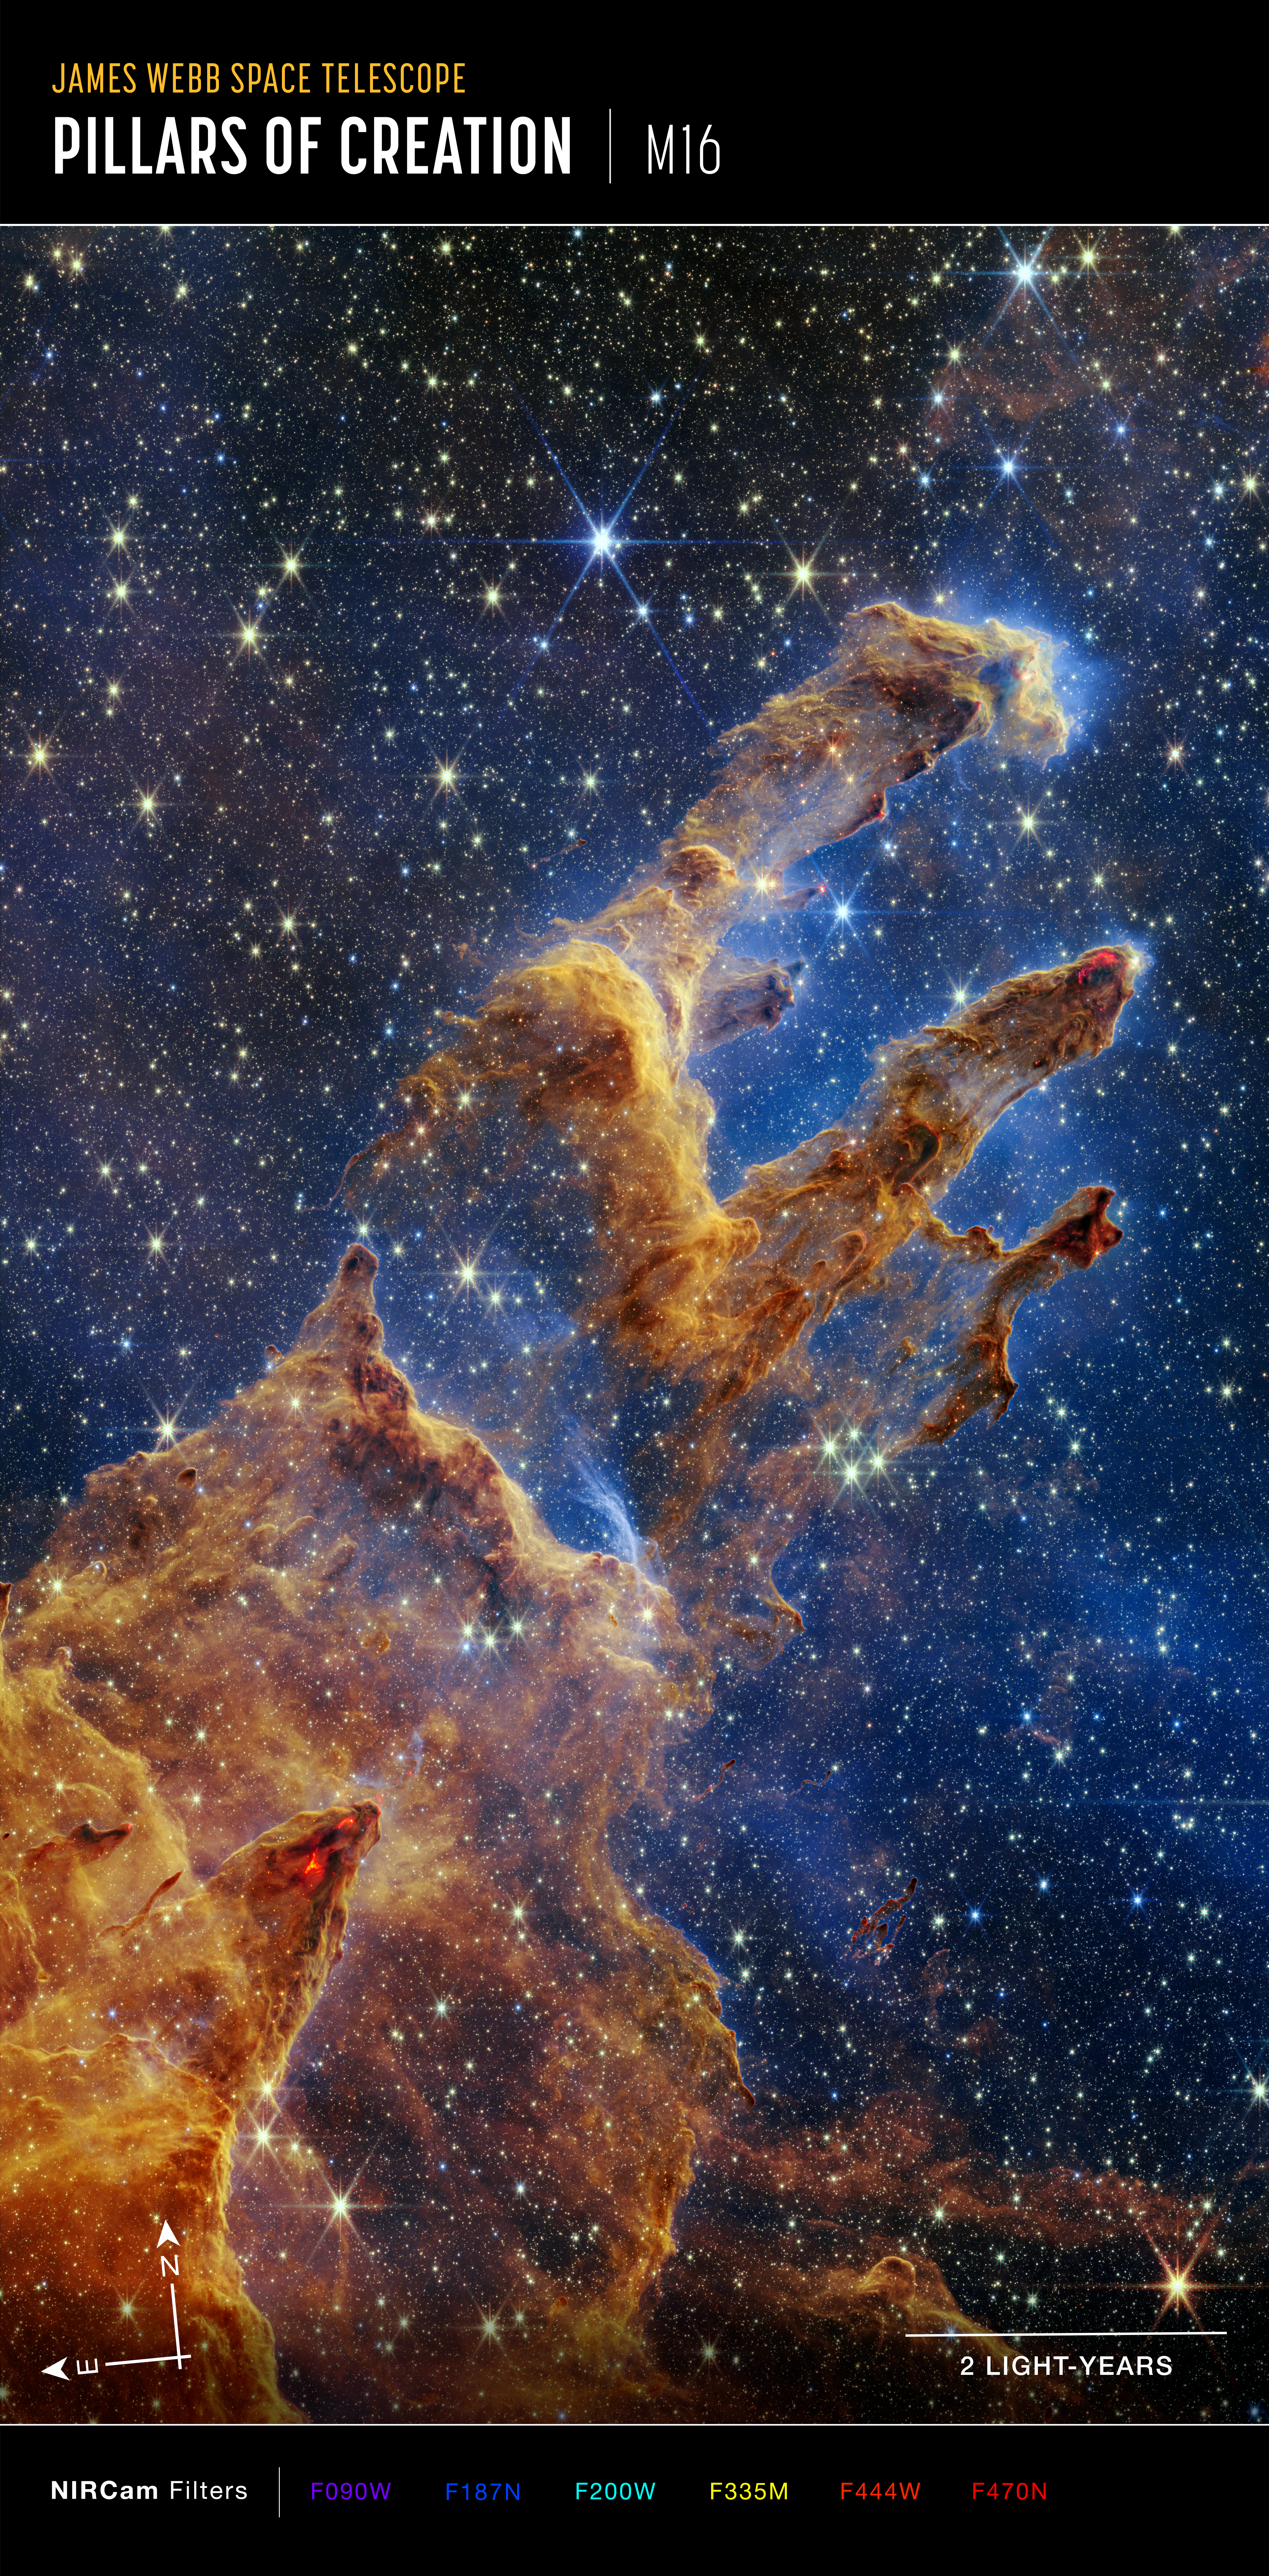

Webb Takes a Stunning, Star-Filled Portrait of the Pillars of Creation (Annotated)

The Pillars of Creation are set off in a kaleidoscope of colour in the NASA/ESA/CSA James Webb Space Telescope’s near-infrared-light view. The pillars look like arches and spires rising out of a desert landscape, but are filled with semi-transparent gas and dust, and ever changing. This is a region where young stars are forming – or have barely burst from their dusty cocoons as they continue to form.

Protostars are the scene-stealers in this Near-Infrared Camera (NIRCam) image. These are the bright red orbs that sometimes appear with eight diffraction spikes. When knots with sufficient mass form within the pillars, they begin to collapse under their own gravity, slowly heat up, and eventually begin shining brightly.

Along the edges of the pillars are wavy lines that look like lava. These are ejections from stars that are still forming. Young stars periodically shoot out jets that can interact within clouds of material, like these thick pillars of gas and dust. This sometimes also results in bow shocks, which can form wavy patterns like a boat does as it moves through water. These young stars are estimated to be only a few hundred thousand years old, and will continue to form for millions of years.

Although it may appear that near-infrared light has allowed Webb to “pierce through” the background to reveal great cosmic distances beyond the pillars, the interstellar medium stands in the way, like a drawn curtain.

This is also the reason why there are no distant galaxies in this view. This translucent layer of gas blocks our view of the deeper universe. Plus, dust is lit up by the collective light from the packed “party” of stars that have burst free from the pillars. It’s like standing in a well-lit room looking out a window – the interior light reflects on the pane, obscuring the scene outside and, in turn, illuminating the activity at the party inside.

Webb’s new view of the Pillars of Creation will help researchers revamp models of star formation. By identifying far more precise star populations, along with the quantities of gas and dust in the region, they will begin to build a clearer understanding of how stars form and burst out of these clouds over millions of years.

The Pillars of Creation is a small region within the vast Eagle Nebula, which lies 6,500 light-years away.

Webb’s NIRCam was built by a team at the University of Arizona and Lockheed Martin’s Advanced Technology Center.

Credit: NASA, ESA, CSA, STScI; J. DePasquale, A. Koekemoer, A. Pagan (STScI).and Alyssa Pagan (STScI)